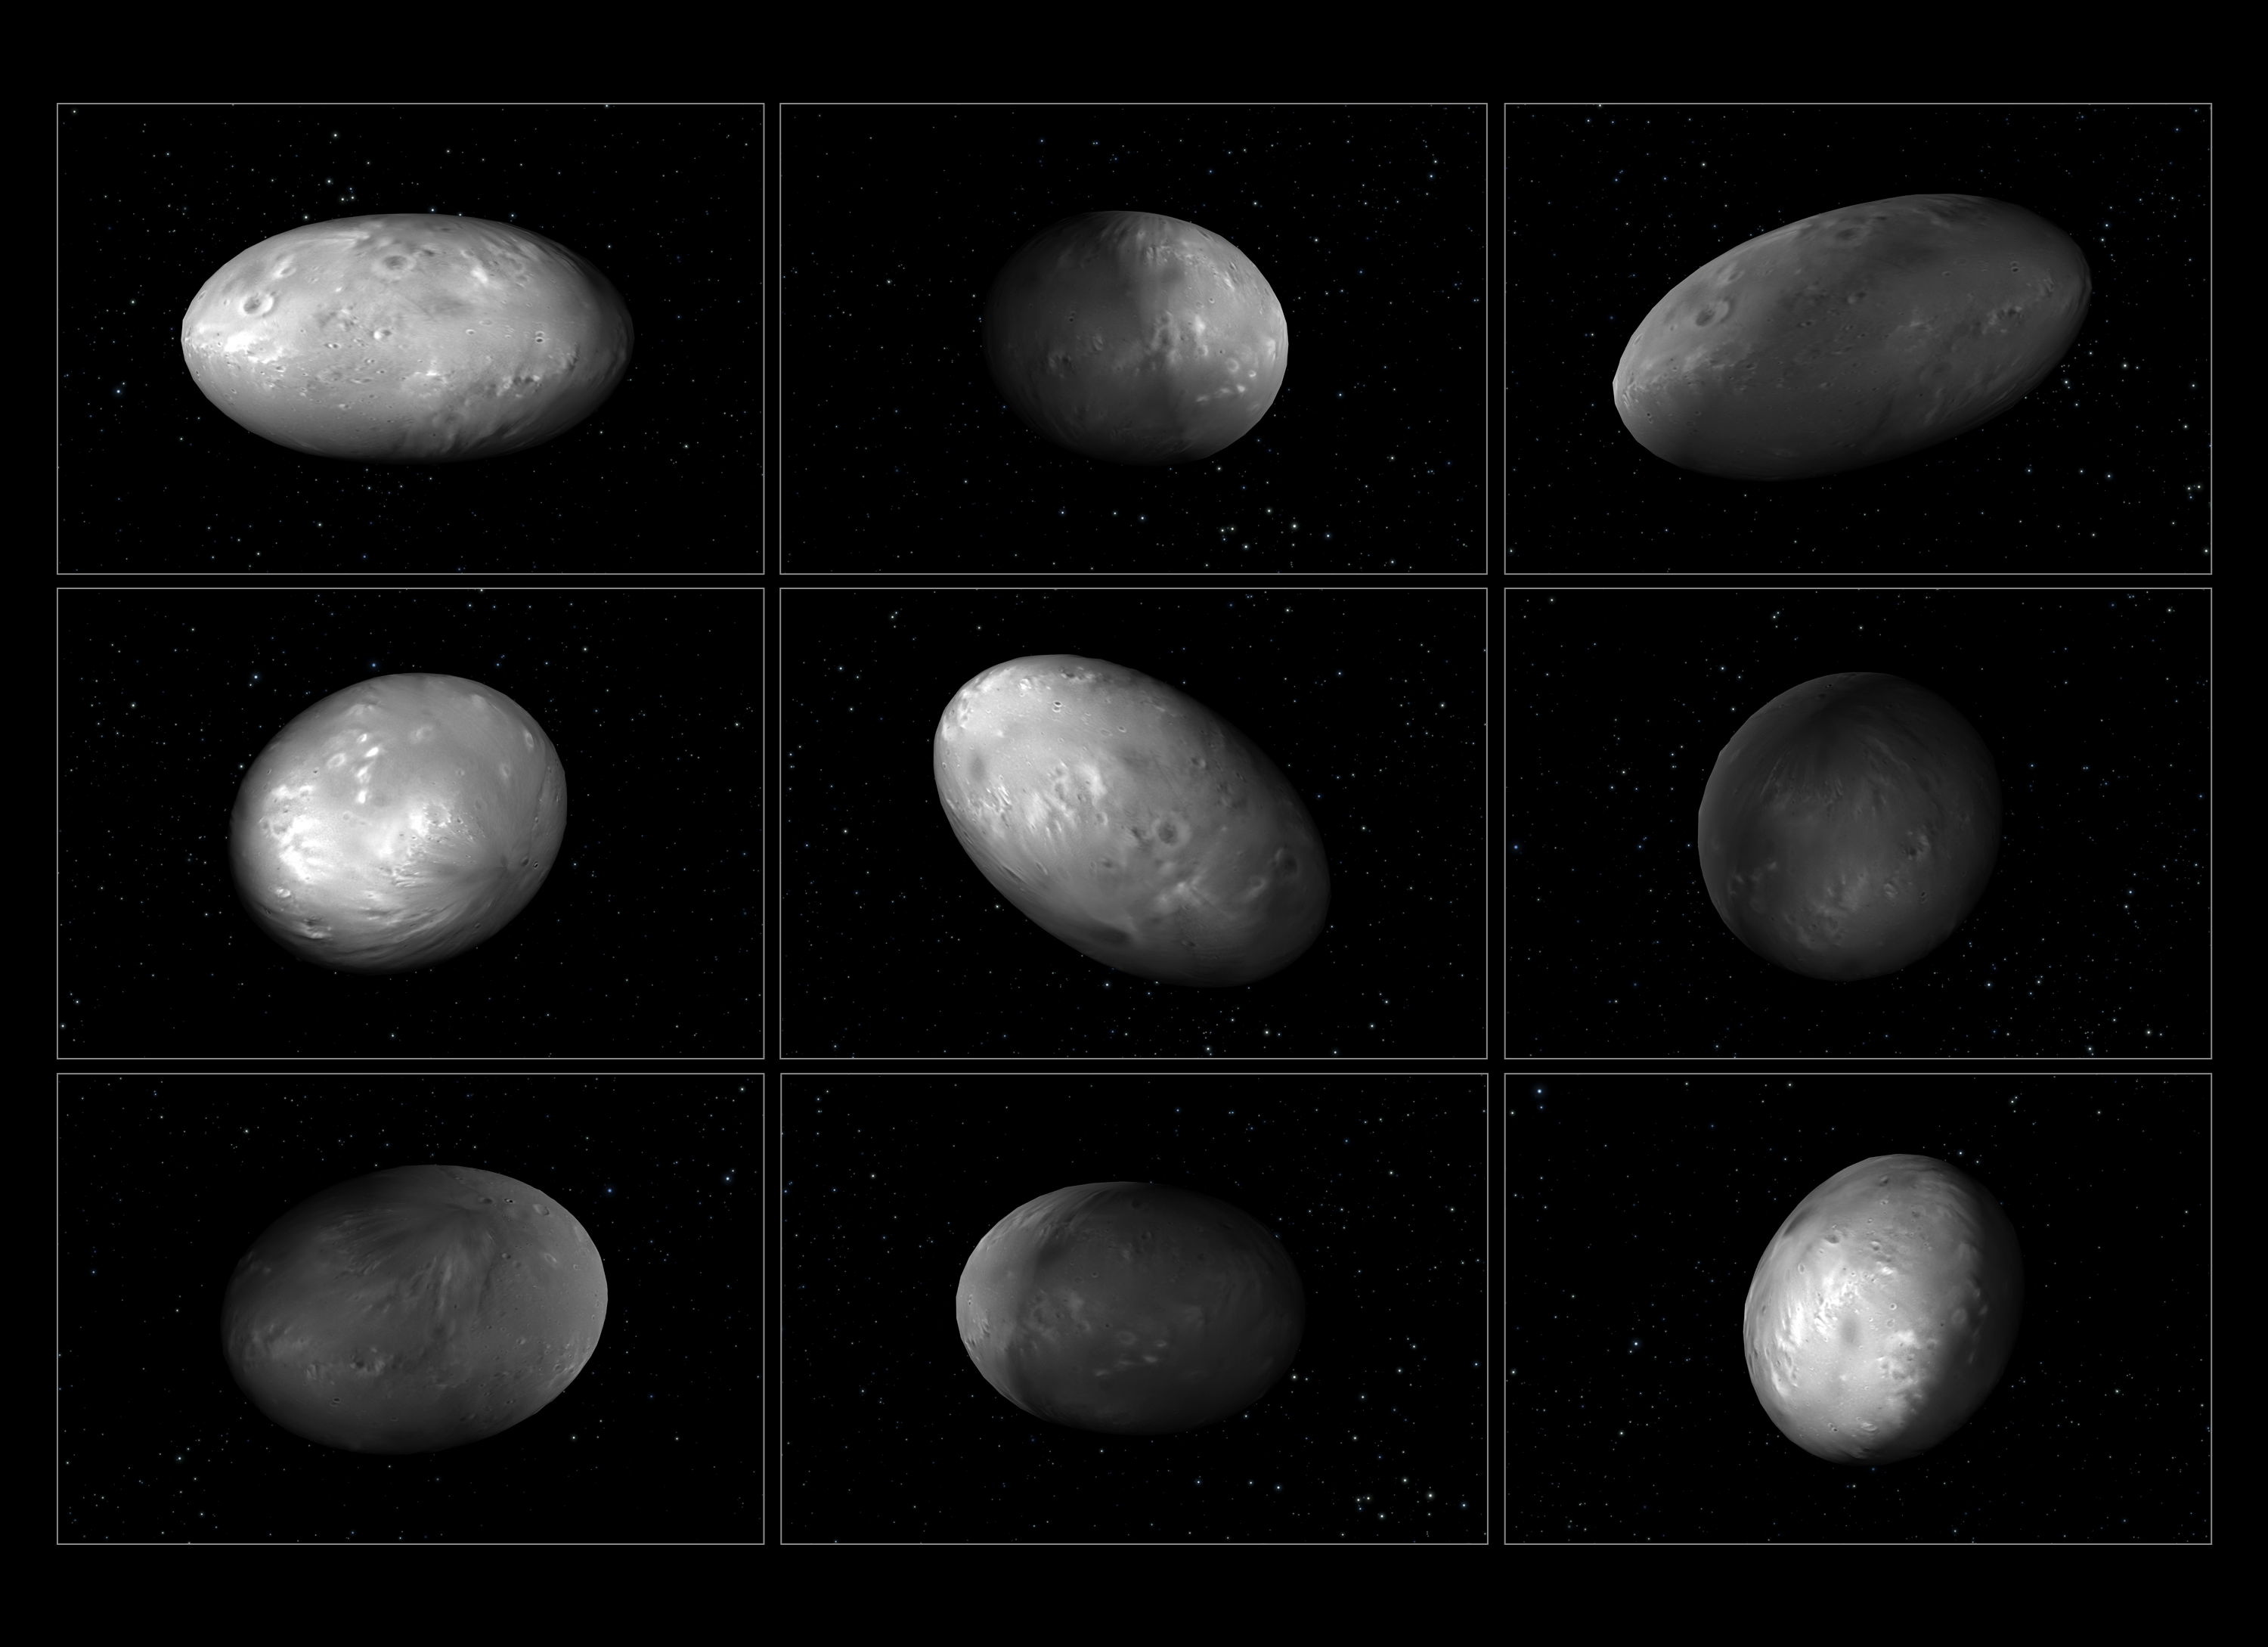

The chaotic spin of Pluto’s moon Nix

This set of illustrations of Pluto’s moon Nix shows how the orientation of the moon changes unpredictably as it orbits the Pluto-Charon system. This illustration is based on a computer simulation which calculated the chaotic movement of the four smaller moons in the Pluto-Charon system. Astronomers used this simulation to try and understand the unpredictable changes in reflected light from Nix as it orbits Pluto-Charon. They also found that Pluto’s moon Hydra undergoes a chaotic spin as well. The football-shape of both moons contributes to their wild motion.

Credit: NASA, ESA, M. Showalter (SETI Inst.), G. Bacon (STScI)